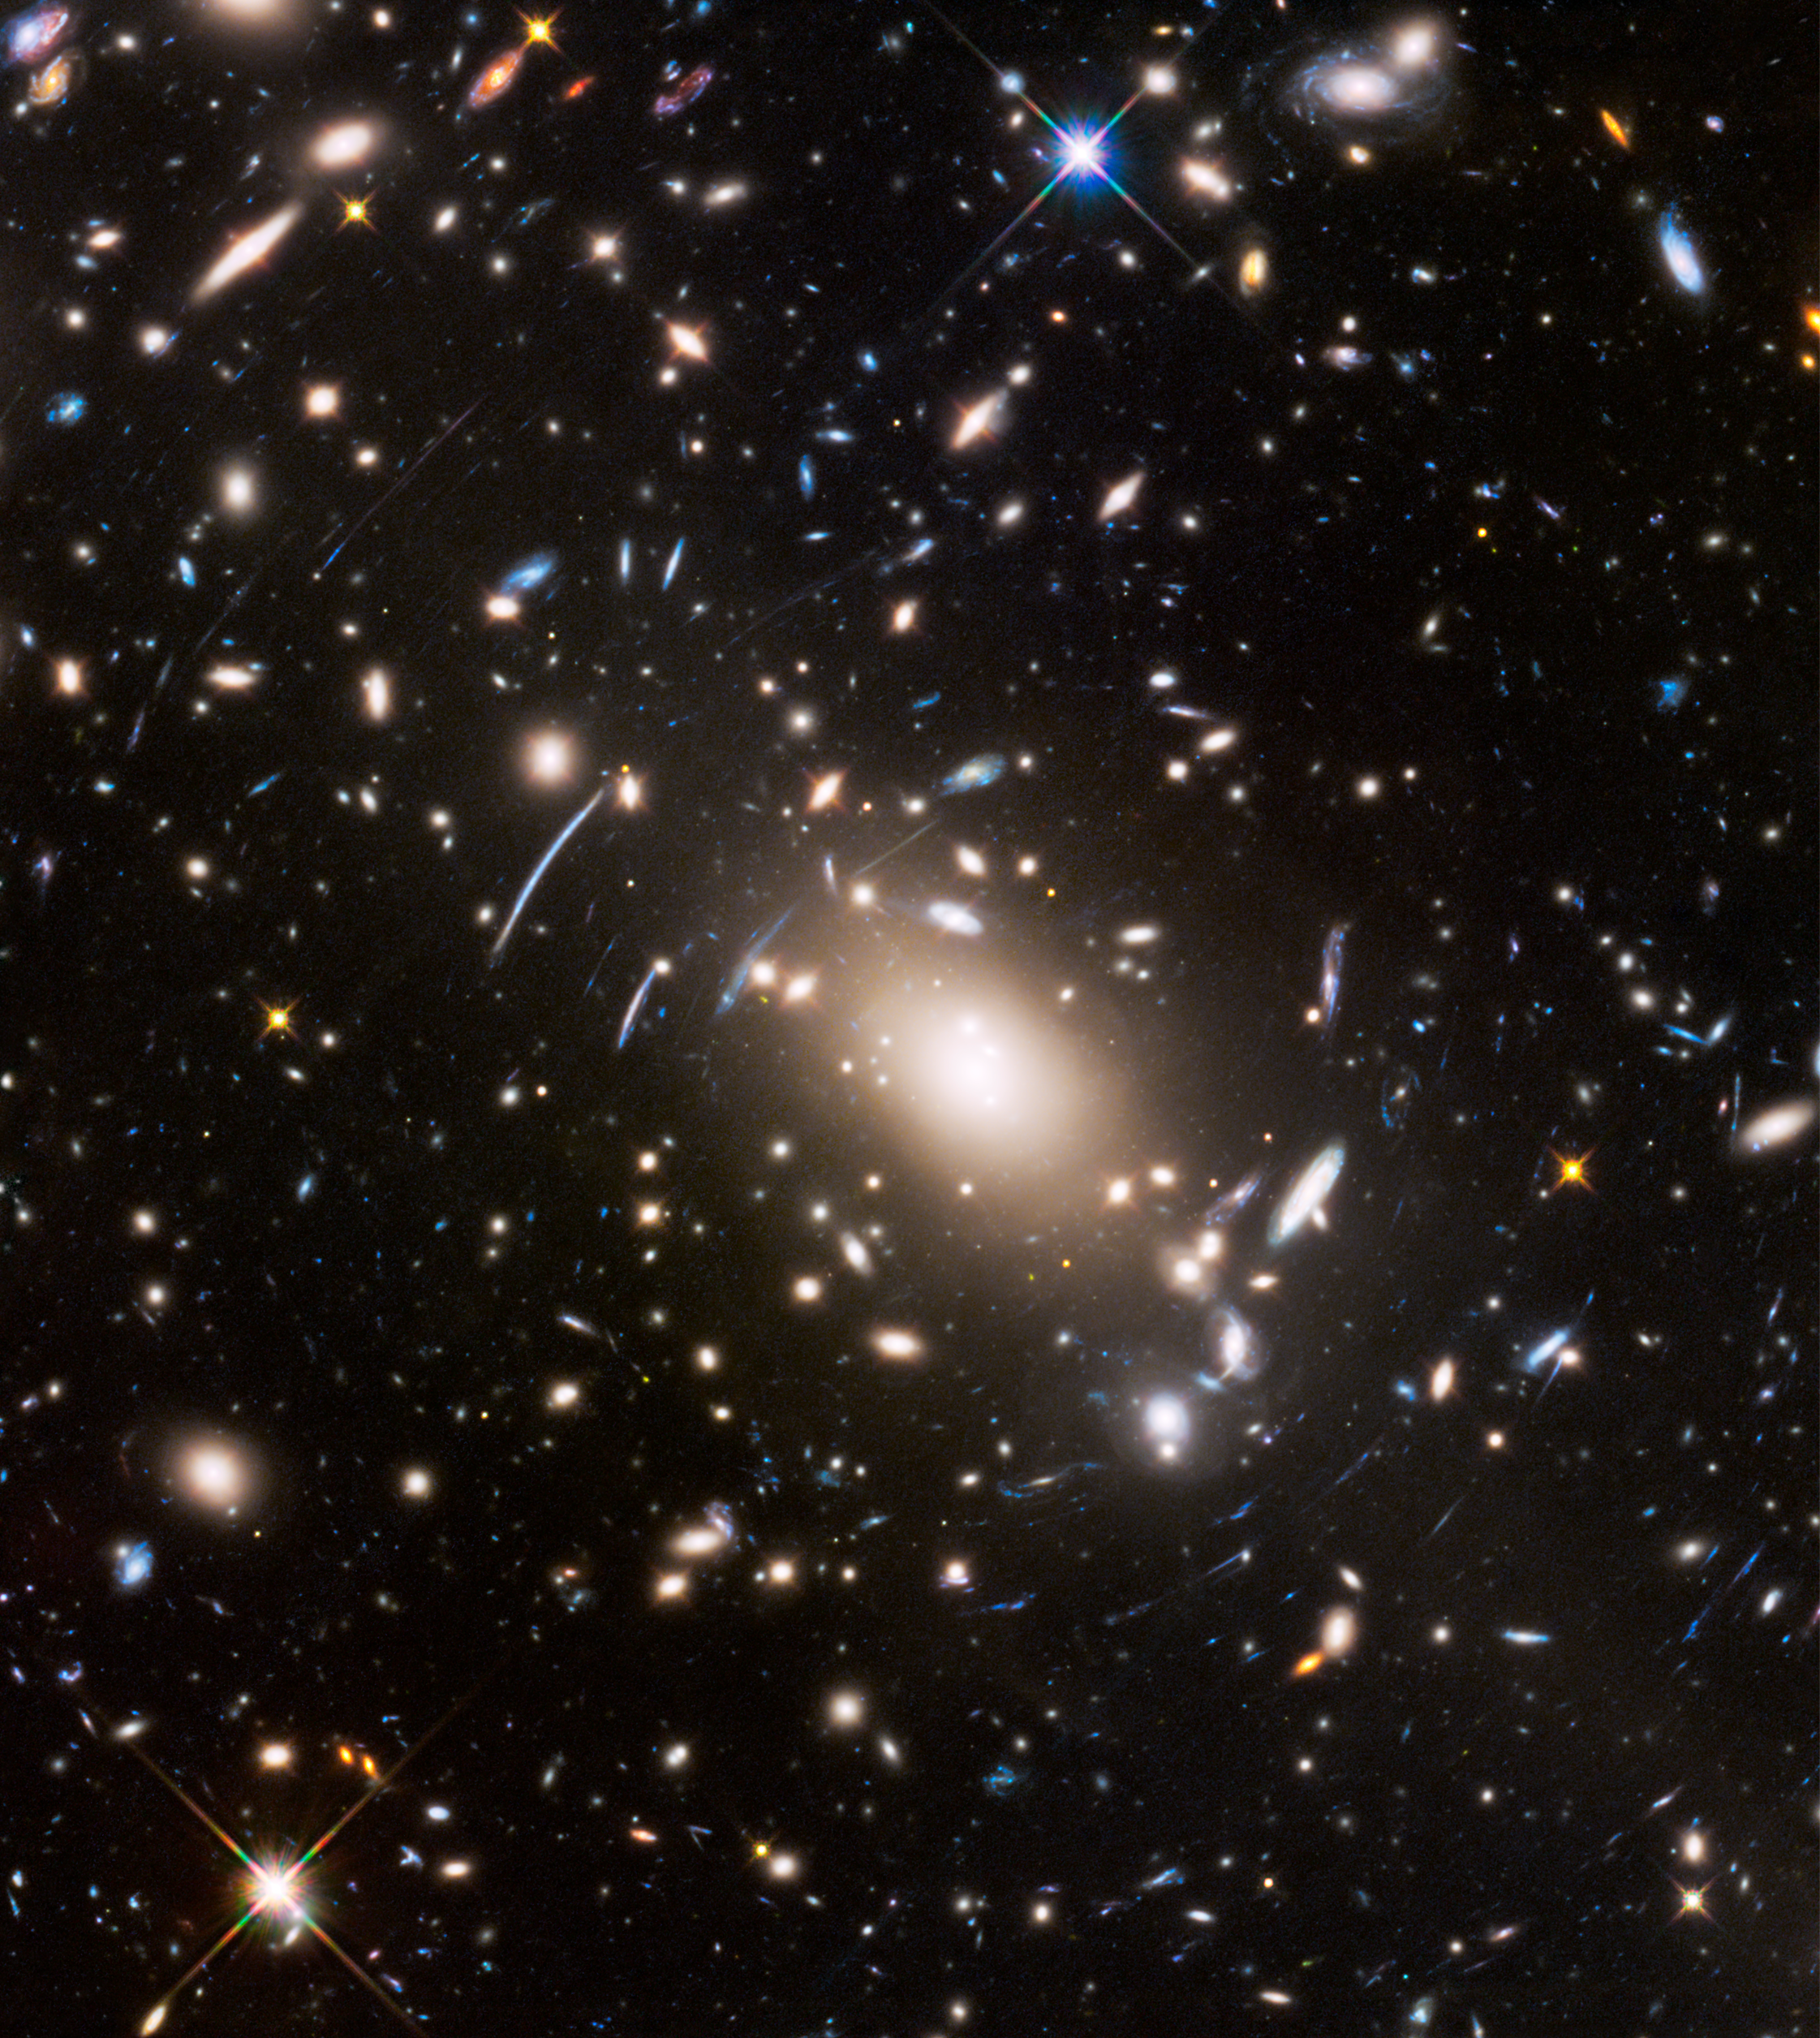

Hubble image of Abell S1063

Abell S1063, a galaxy cluster, was observed by the NASA/ESA Hubble Space Telescope as part of the Frontier Fields programme. The huge mass of the cluster acts as a cosmic magnifying glass and enlarges even more distant galaxies, so they become bright enough for Hubble to see.

Credit: NASA, ESA, and J. Lotz (STScI)